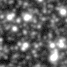

Lone black hole passes in front of star (ground-based view)

Two images of a crowded starfield as seen through a ground-based telescope show the subtle brightening of a star due to the effect of gravitational microlensing, where an invisible but massive foreground object passes in front of the star and amplifies its light.

Credit: NOAO, Cerro Tololo Inter-American Observatory